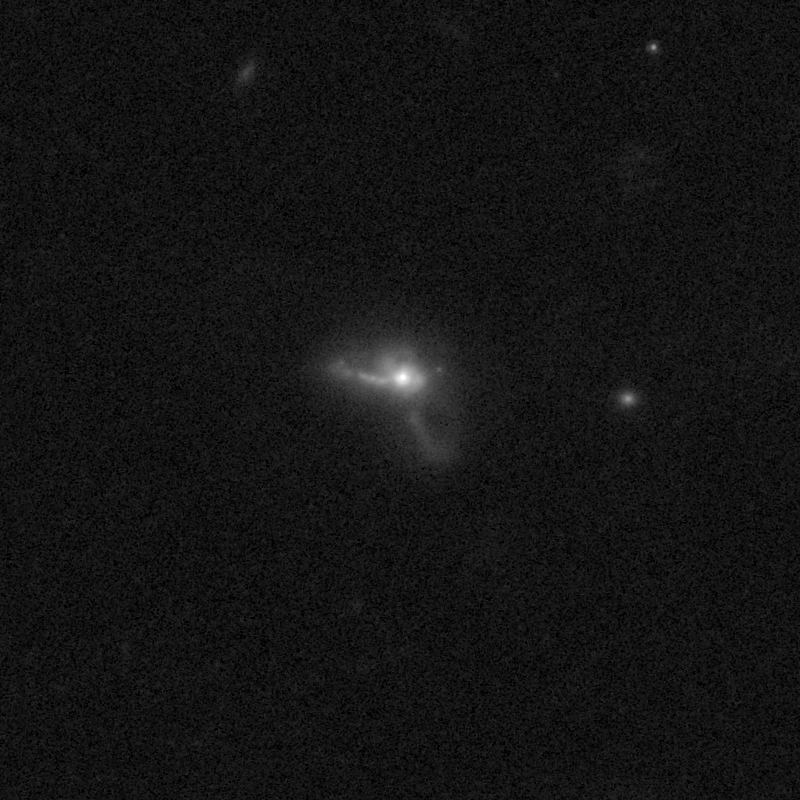

Outflows from merging galaxy J2118+0017

This NASA/ESA Hubble Space Telescope image of the galaxy J2118+0017 shows it is undergoing a firestorm of star birth, as shown by its bright white cores.

This star-making frenzy was ignited by mergers with other galaxies. The odd shape of the galaxy is telltale evidence of a close encounters.

The new Hubble Wide Field Camera 3 observations of this and eleven other galaxies undergoing the same process suggest that energy from the star-birthing frenzies created powerful winds that are blowing out the gas, meaning it is not available to form future generations of stars.

This activity occurred when the Universe was half its current age of 13.7 billion years. The gas-poor galaxies may eventually become so-called red and dead galaxies, composed only of aging stars.

This Hubble false-colour image was processed to bring out important details in the galaxy. The images were taken in 2010.

Credit: NASA, ESA, and P. Sell (Texas Tech University)